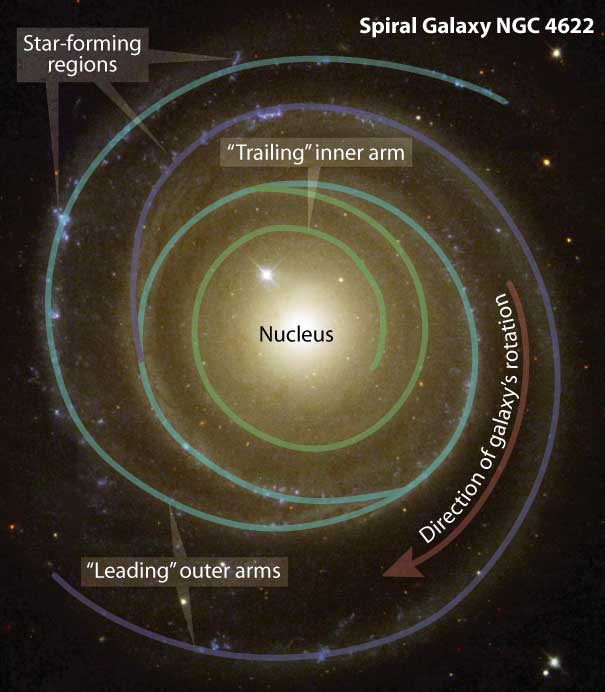

NGC 4622

Astronomers have found a spiral galaxy that may be spinning to the beat of a different cosmic drummer. To the surprise of astronomers, the galaxy, called NGC 4622, appears to be rotating in the opposite direction to what they expected. Pictures from the NASA/ESA Hubble Space Telescope helped astronomers determine that the galaxy may be spinning clockwise by showing which side of the galaxy is closer to Earth. This Hubble telescope photo of the oddball galaxy is presented by the Hubble Heritage team. The image shows NGC 4622 and its outer pair of winding arms full of new stars [shown in blue].

Credit: Z. Levay (STScI)